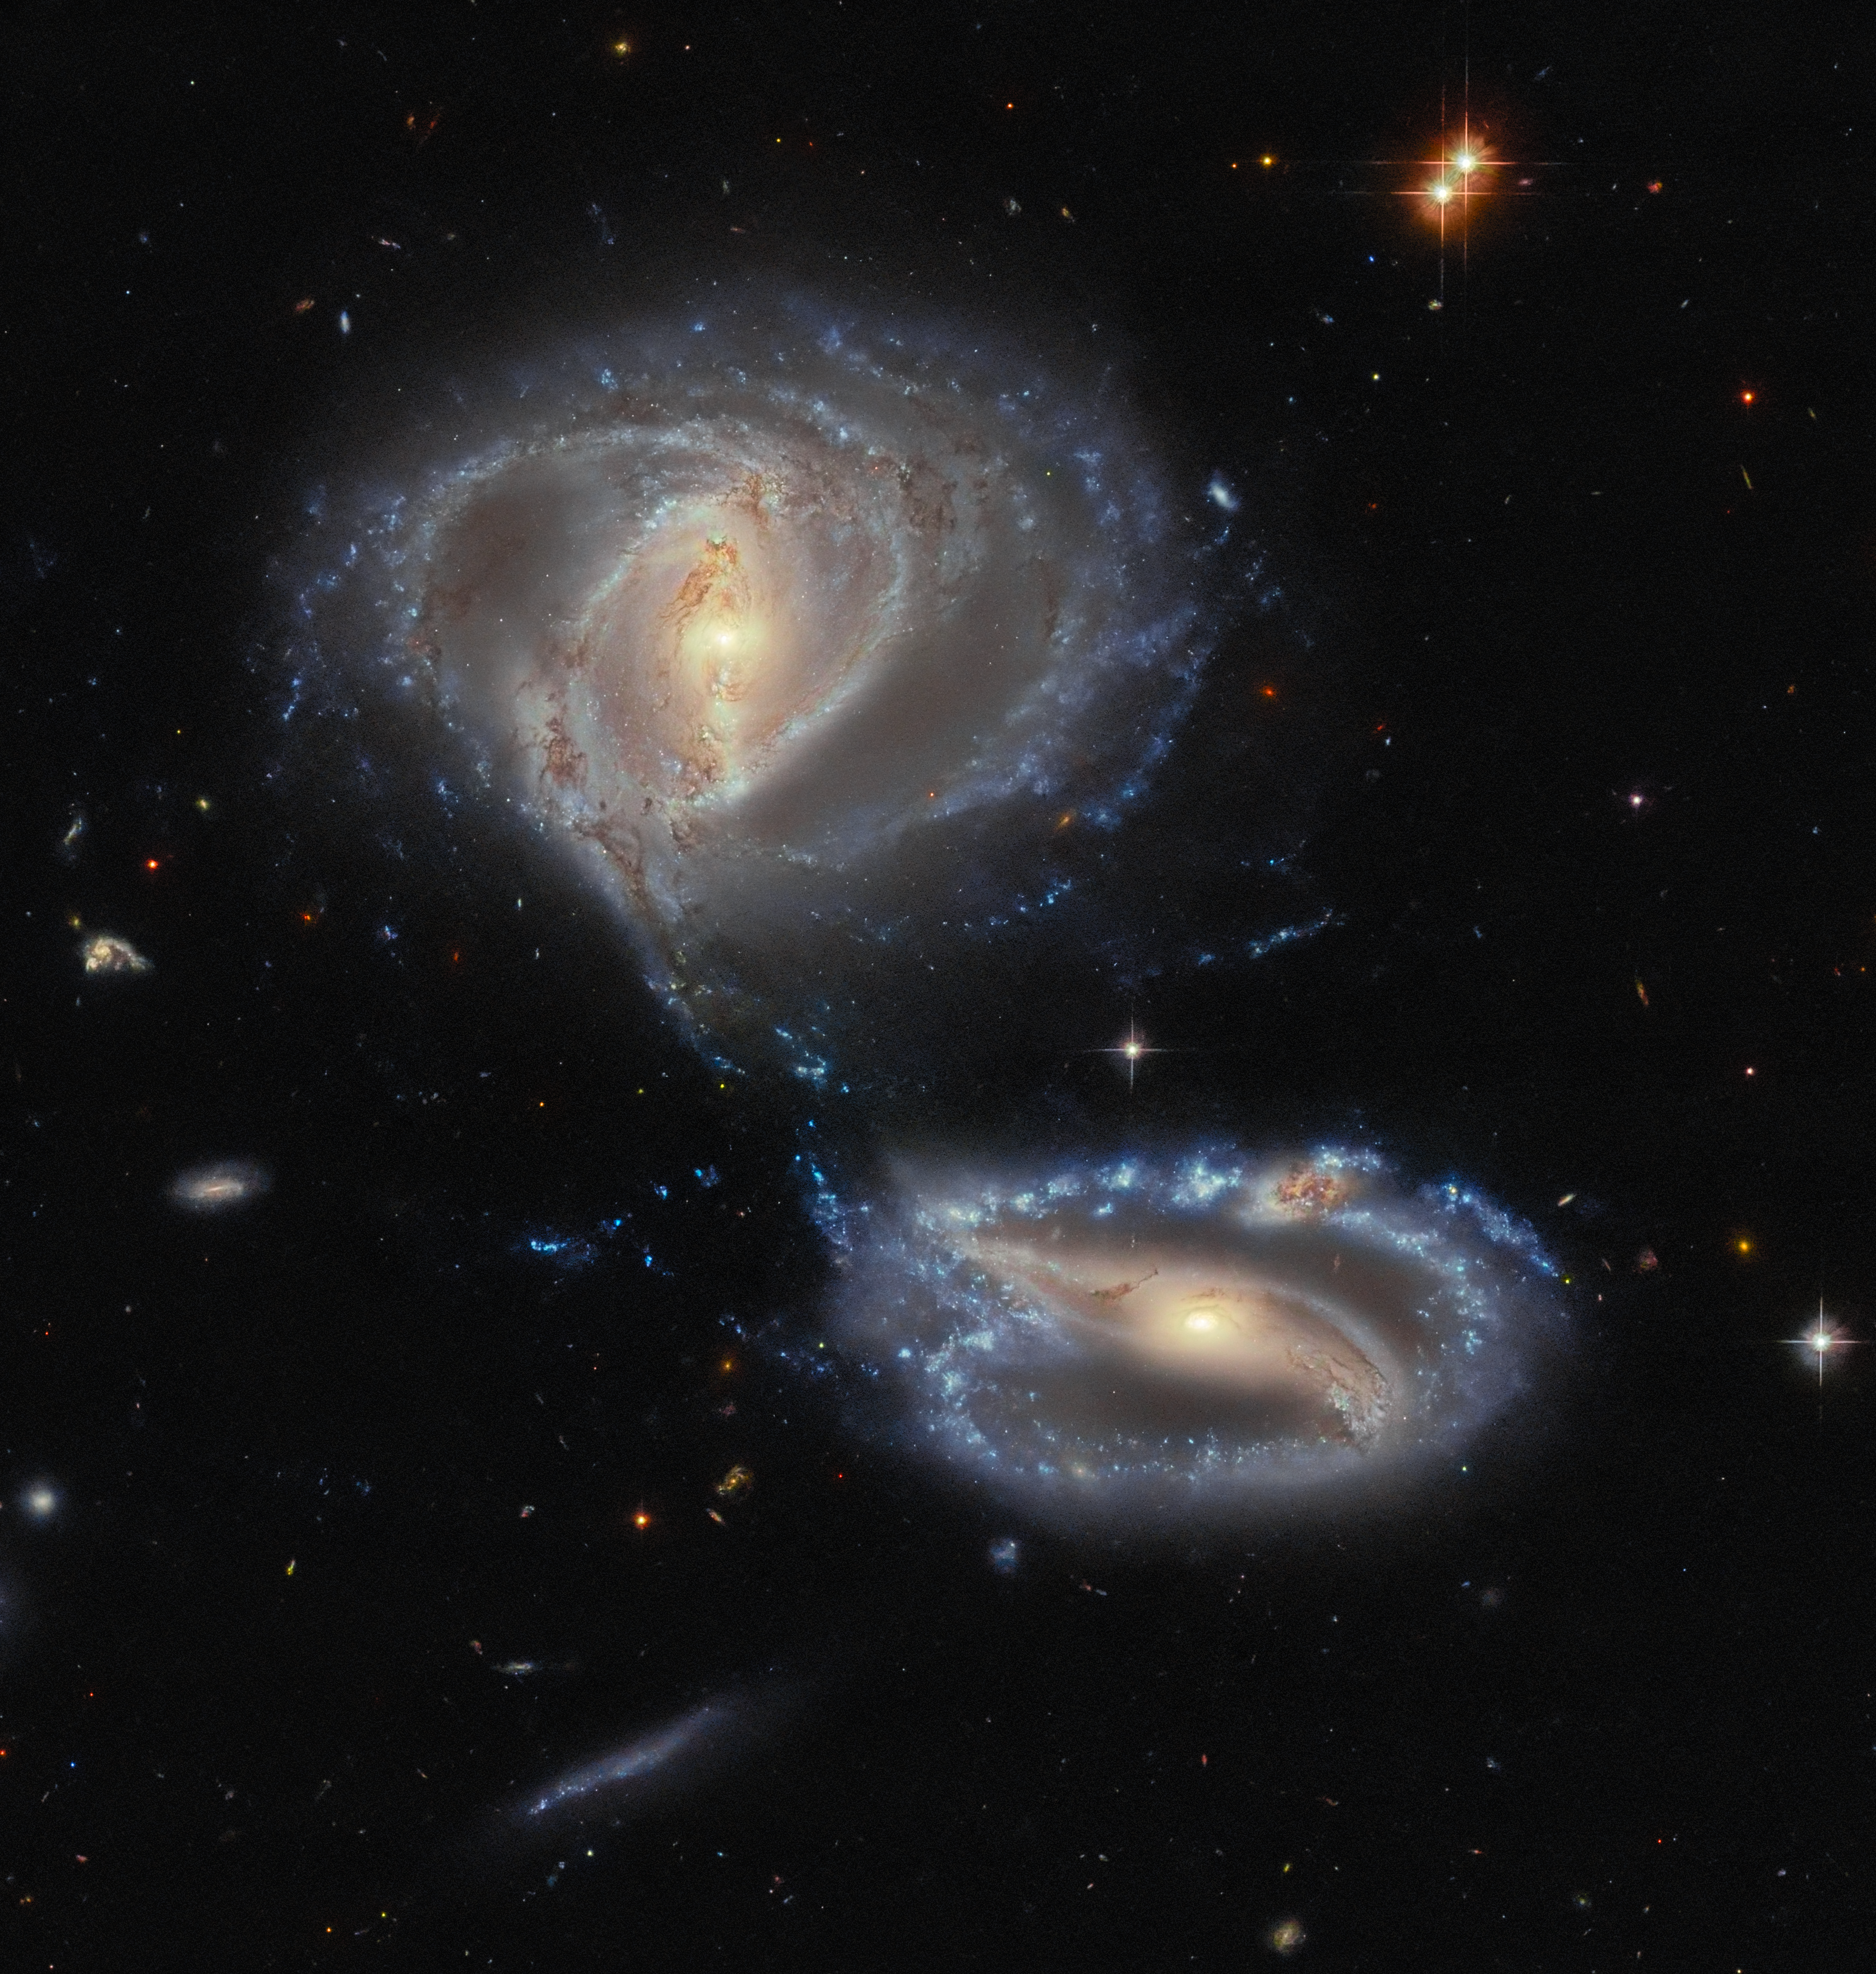

A dynamic duo … or trio?

This striking image captures the interacting galaxy pair known as Arp-Madore 2339-661, so named because they belong to the Arp-Madore catalogue of peculiar galaxies. However, this particular peculiarity might be even odder than first meets the eye, as there are in fact three galaxies interacting here, not just two.

The two clearly defined galaxies are NGC 7733 (smaller, lower right) and NGC 7734 (larger, upper left). The third galaxy is currently referred to as NGC 7733N, and can actually be spotted in this picture if you look carefully at the upper arm of NGC 7733, where there is a visually notable knot-like structure, glowing with a different colour to the arm and obscured by dark dust. This could easily pass as part of NGC 7733, but analysis of the velocities (speed, but also considering direction) involved in the galaxy shows that this knot has a considerable additional redshift, meaning that it is very likely its own entity and not part of NGC 7733. This is actually one of the many challenges that observational astronomers face: working out whether an astronomical object really is just one, or one lying in front of another as seen from Earth’s perspective!

All three galaxies lie quite close to each other, roughly 500 million light-years from Earth in the constellation Tucana, and, as this image shows, they are interacting gravitationally with one another. In fact, some science literature refers to them as a ‘merging group’, meaning that they are on a course to ultimately become a single entity.

Credit: ESA/Hubble & NASA, J. Dalcanton, Dark Energy Survey/DOE/FNAL/NOIRLab/NSF/AURA Acknowledgement: L. Shatz